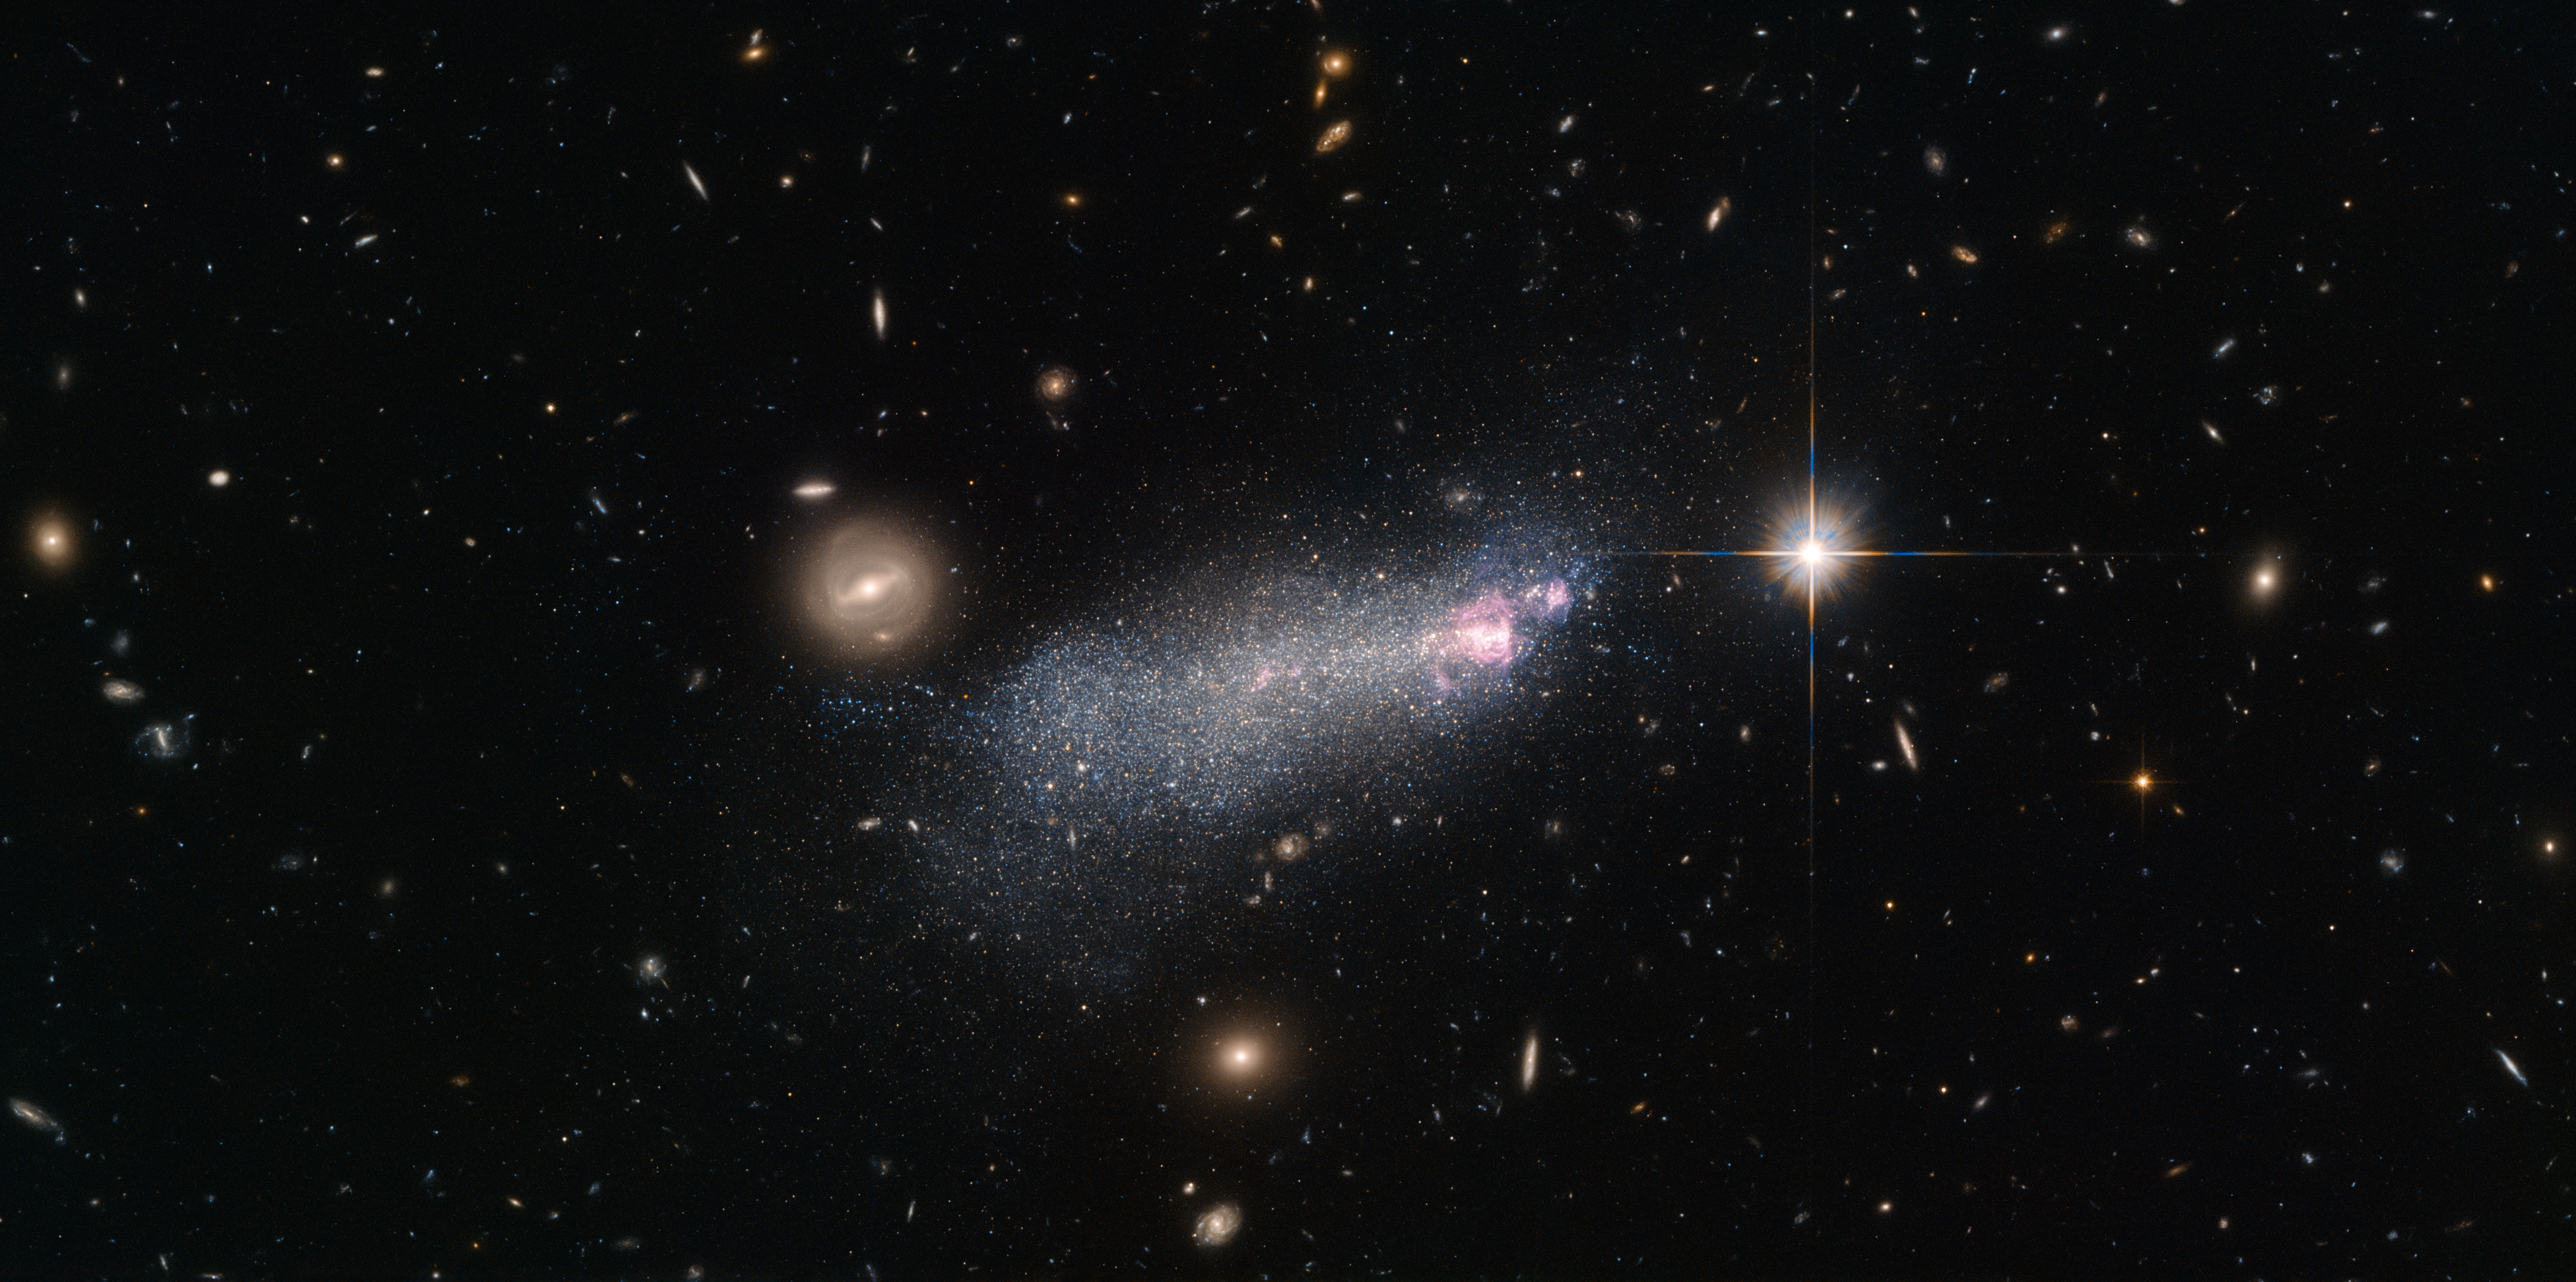

Intense and short-lived

This NASA/ESA Hubble Space Telescope picture shows a galaxy named SBS 1415+437 or SDSS CGB 12067.1, located about 45 million light-years from Earth. SBS 1415+437 is a Wolf–Rayet galaxy, a type of starbursting galaxy with an unusually high number of extremely hot and massive stars known as Wolf–Rayet stars.

These stars can be around 20 times as massive as the Sun, but seem to be on a mission to shed surplus mass as quickly as possible — they blast substantial winds of particles out into space, causing them to dwindle at a rapid rate. A typical star of this type can lose a mass equal to that of our Sun in just 100 000 years!

These massive stars are also incredibly hot, with surface temperatures some 10 to 40 times that of the Sun, and very luminous, glowing at tens of thousands to several million times the brightness of the Sun. Many of the brightest and most massive stars in the Milky Way are Wolf–Rayet stars.

Because these stars are so intense they do not last very long, burning up their fuel and blasting their bulk out into the cosmos on very short timescale ‒ only a few hundred thousand years. Because of this it is unusual to find more than a few of these stars per galaxy — except in Wolf–Rayet galaxies, like the one in this image.

Credit: ESA/Hubble & NASA